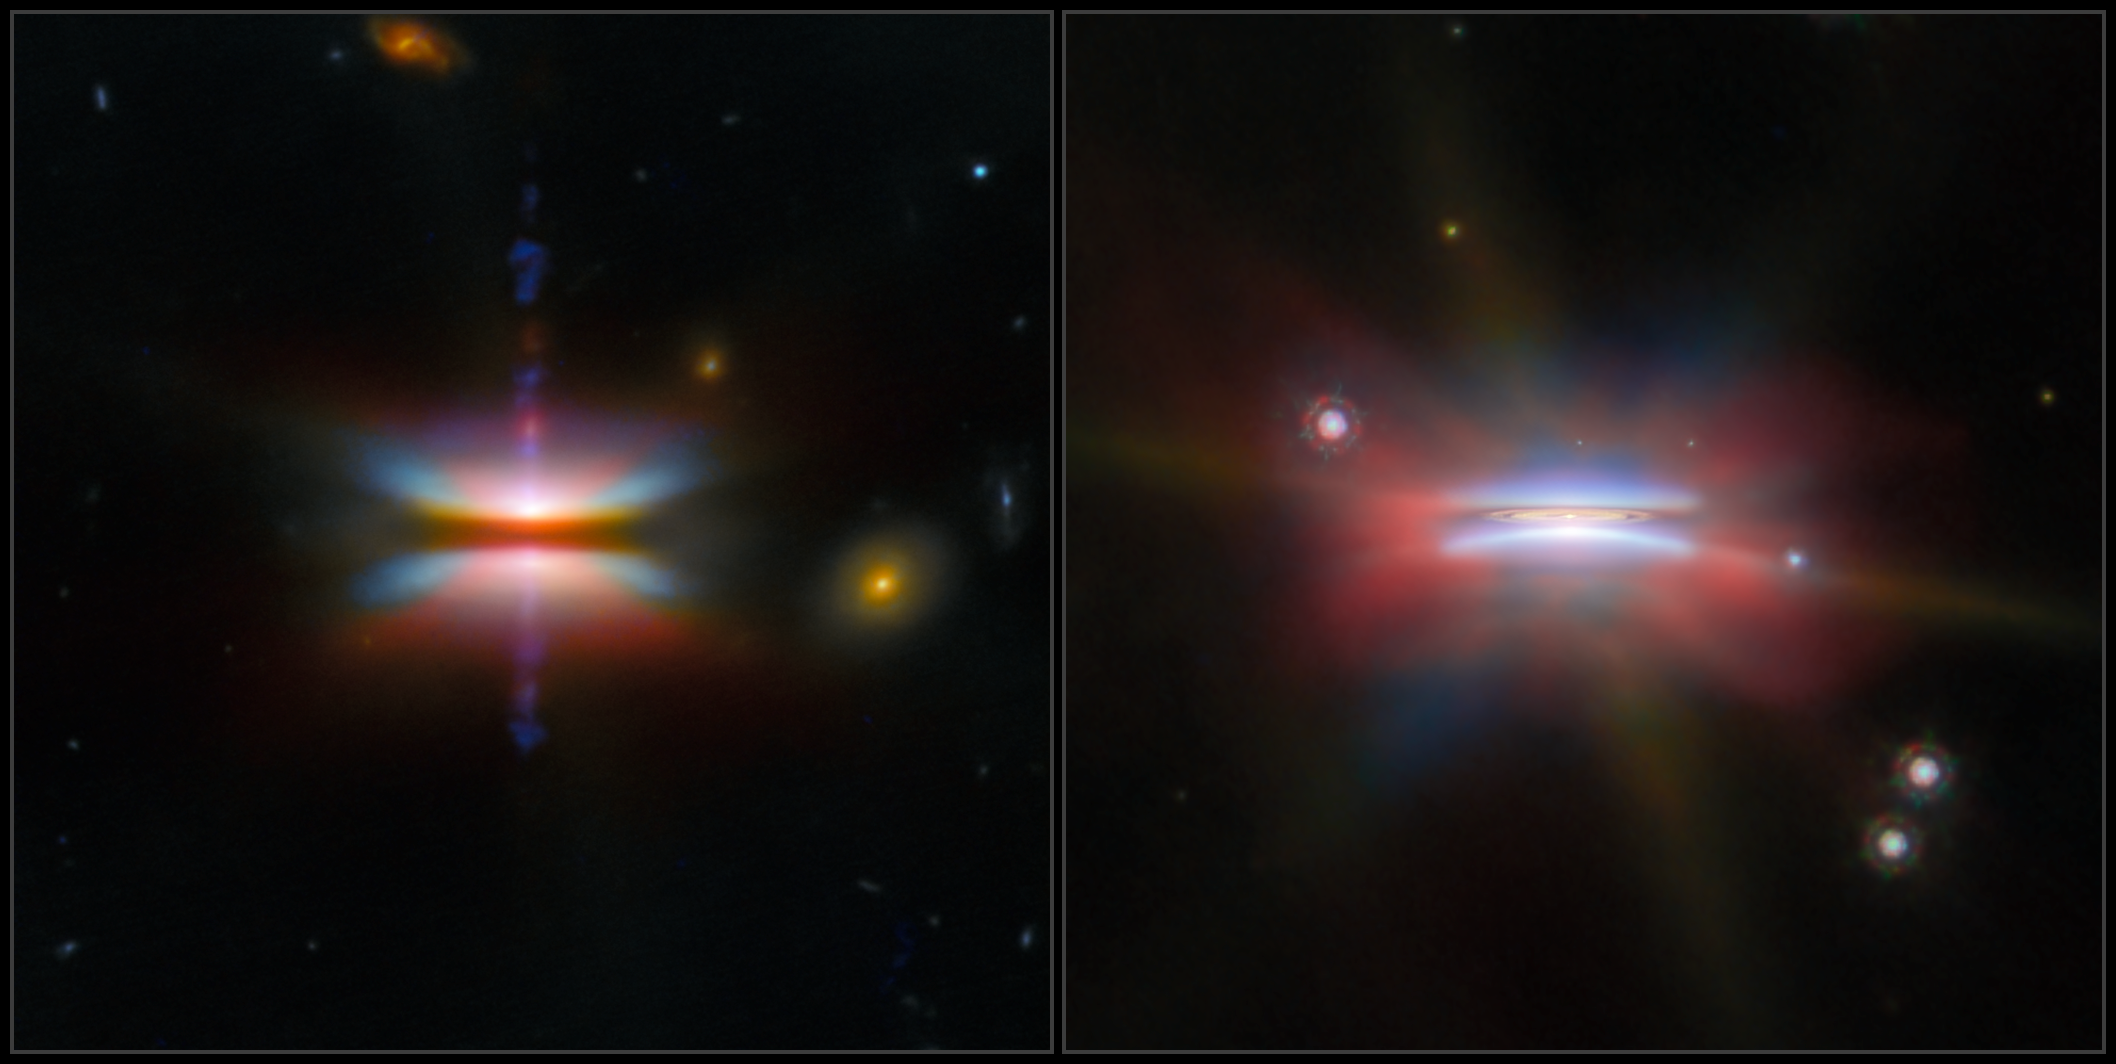

A pair of planet-forming discs

This month’s ESA/Webb Picture of the Month offers us a two-for-one on brand new stars — with some potential planets thrown in as well! This visual highlights views from the NASA/ESA/CSA James Webb Space Telescope of the protoplanetary discs Tau 042021 (left) and Oph 163131 (right), otherwise known by the catalogue numbers 2MASS J04202144+2813491 and 2MASS J16313124-2426281, respectively. Tau 042021 is situated around 450 light-years from Earth in the constellation Taurus, while Oph 163131 lies about 480 light-years away in Ophiuchus.

Protoplanetary discs like these appear around stars that have recently been born. When a clump of gas inside a larger molecular cloud collapses to form a star, unused gas and dust is left orbiting the star in a thick disc. Over time, this dust too collides and collapses, slowly forming planetesimals which can, in turn, develop into planets. The planetesimals which can’t make the jump to being a fully-fledged planet are left behind as asteroids and comets orbiting the star. Gas that isn’t consumed by this process is blown away by the new star’s radiation over the course of tens of millions of years, ending the protoplanetary disc. This is how our own Solar System formed in the distant past, creating the asteroids, comets, gas giants and terrestrial planets we know today. By observing other protoplanetary discs at a much earlier age, we can work out how this process worked for our own Solar System, and how the different kinds of planets we see across the galaxy could have formed.

The unique feature these two objects have in common is that, as we see them from our vantage point with Webb, they are oriented with the edge of the disc facing us. This means that the bright light from the young star in the centre is mostly blocked, and we see the fine dust that has risen out of the disc as a nebula above and below the disc, lit by reflected light from the star. Not only is this a beautiful sight, producing these images that resemble rainbow-coloured spinning tops in space, it’s essential for studying how these planet-forming discs are composed. The distribution of dust in the disc, both within it and above or below it, strongly affects where and how planets can form.

These images were created using data from Webb’s NIRCam and MIRI instruments, as part of Webb programme #2562 (PI F. Ménard, K. Stapelfeldt). With the broad infrared sensitivity of these two cameras, Webb can track dust grains of different sizes across the disc. The red, orange and green colours of the discs in these images indicate various sizes of dust grains as well as molecules such as hydrogen (H2), carbon monoxide (CO) and polycyclic aromatic hydrocarbons (PAHs).

Both images also feature data from the NASA/ESA Hubble Space Telescope, which shows visible light, mainly from the central star reflected off the fine, floating dust. The image of Oph 163131 also includes observations from the Atacama Large Millimeter/submillimeter Array (ALMA). Where Hubble and Webb each image tiny dust grains only micrometres across, ALMA sees larger dust grains that are about a milimetre in size, which are concentrated in the central plane of the disc. This can create the right conditions for the grains to continue to grow and potentially form planets. Indeed, the ALMA data for Oph 163131 shows a gap in the inner disc, which may already be evidence of a planet forming and clearing out the dust around it.

Credit: ESA/Webb, NASA & CSA, ESA/Hubble, ALMA (ESO/NAOJ/NRAO), G. Duchêne, M. Villenave